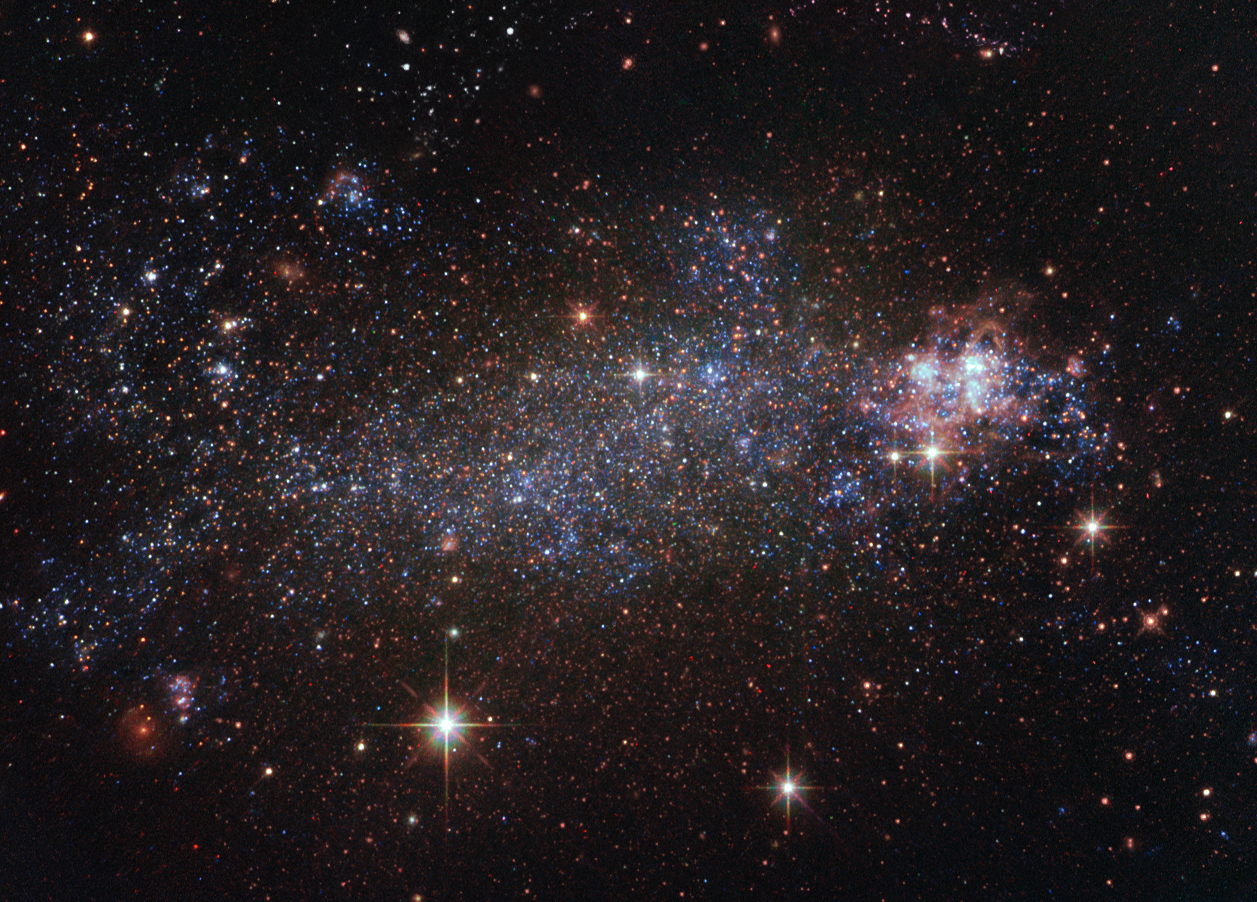

Rebel rebel

Most galaxies possess a majestic spiral or elliptical structure. About a quarter of galaxies, though, defy such conventional, rounded aesthetics, instead sporting a messy, indefinable shape. Known as irregular galaxies, this group includes NGC 5408, the galaxy that has been snapped here by the NASA/ESA Hubble Space Telescope.

English polymath John Herschel recorded the existence of NGC 5408 in June 1834. Astronomers had long mistaken NGC 5408 for a planetary nebula, an expelled cloud of material from an aging star. Instead, bucking labels, NGC 5408 turned out to be an entire galaxy, located about 16 million light-years from Earth in the constellation of Centaurus (The Centaur).

In yet another sign of NGC 5408 breaking convention, the galaxy is associated with an object known as an ultraluminous X-ray source, dubbed NGC 5408 X-1, one of the best studied of its class. These rare objects beam out prodigious amounts of energetic X-rays. Astrophysicists believe these sources to be strong candidates for intermediate-mass black holes. This hypothetical type of black hole has significantly less mass than the supermassive black holes found in galactic centres, which can have billions of times the mass of the Sun, but have a good deal more mass than the black holes formed when giant stars collapse.

A version of this image was entered into the Hubble's Hidden Treasures image processing competition by contestant Judy Schmidt.

Credit: ESA/Hubble & NASA Acknowledgement: Judy Schmidt (Geckzilla)